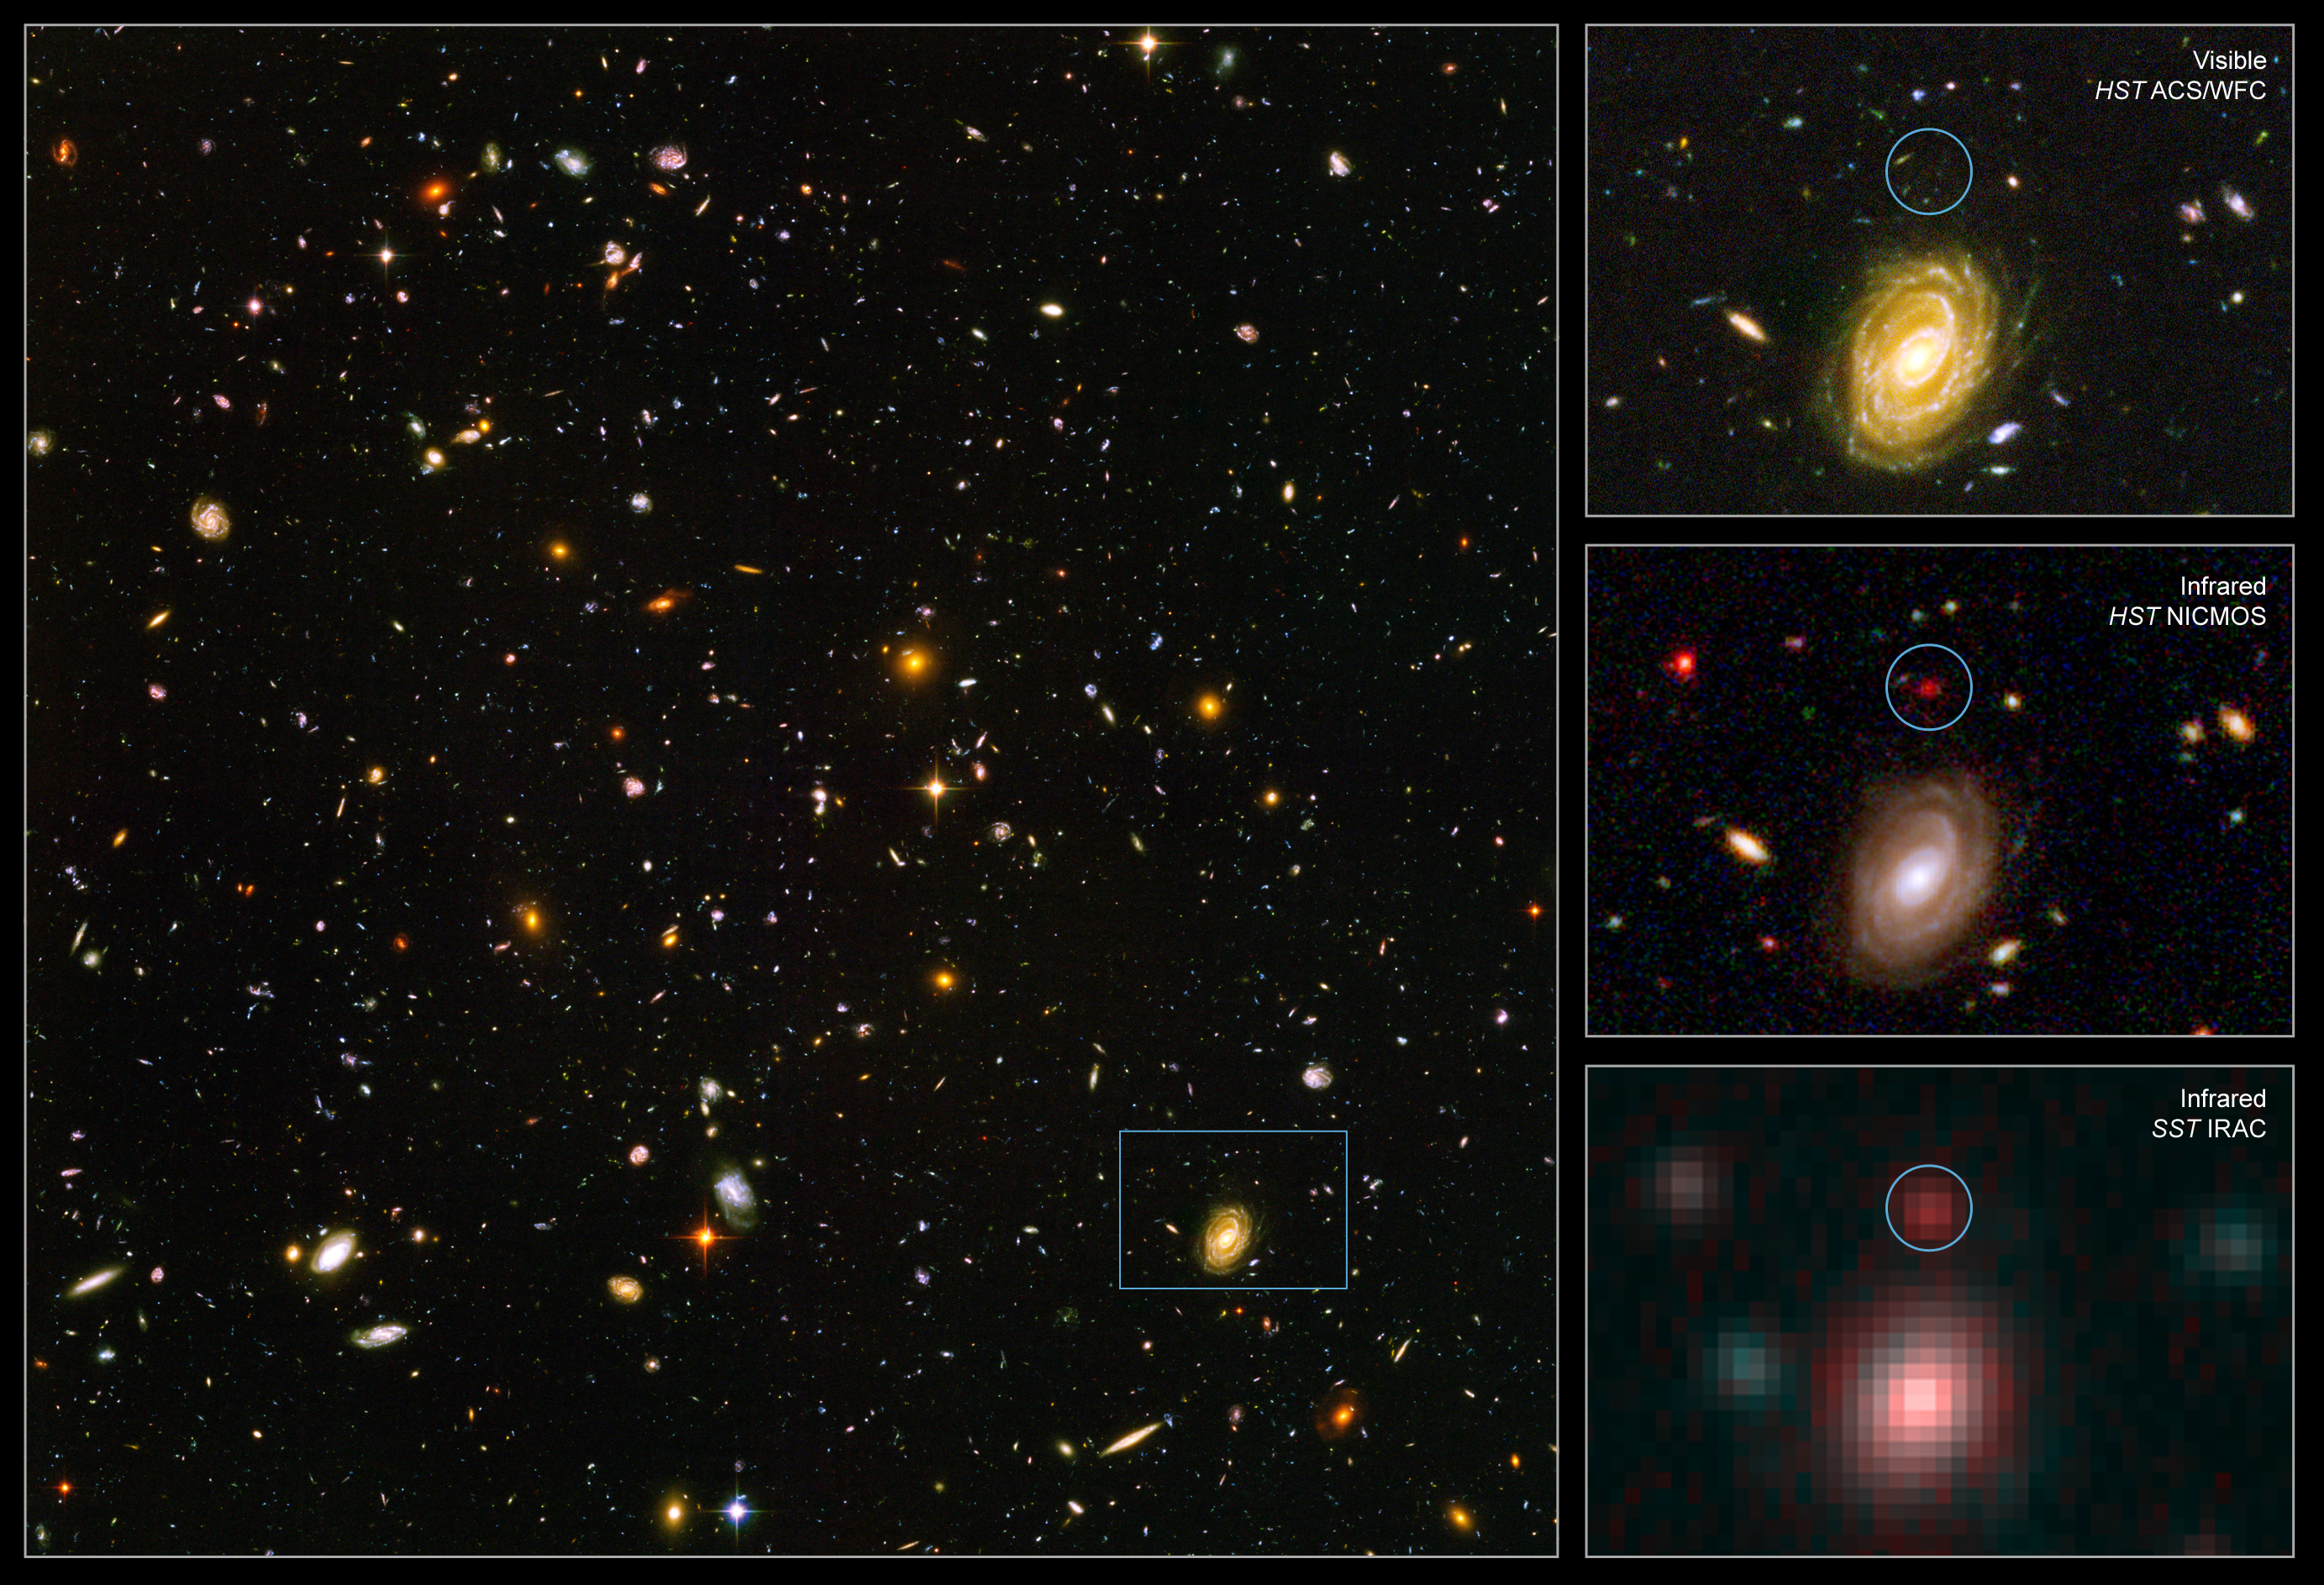

Spitzer and Hubble team up to find "Big Baby" galaxy in the newborn Universe

This image demonstrates how data from two space observatories, the Spitzer and Hubble Space Telescopes, are used to identify one of the most distant galaxies ever seen. This galaxy is unusually massive for its youthful age of 800 million years. (After the Big Bang, the Milky Way by comparison, is approximately 13 billion years old.)

[Left] - The galaxy, named HUDF-JD2, was pinpointed among approximately 10,000 others in a small area of sky called the Hubble Ultra Deep Field (HUDF). This is the deepest images of the universe ever made at optical and near-infrared wavelengths.

[Upper Right] - A blow-up of one small area of the HUDF is used to identify where the distant galaxy is located (inside green circle). This indicates that the galaxy's visible light has been absorbed by traveling billions of light-years through intervening hydrogen.

[Center Right] - The galaxy was detected using Hubble's Near Infrared Camera and Multi-Object Spectrometer (NICMOS). But at near-infrared wavelengths it is very faint and red.

[Bottom Right] - The Spitzer Infrared Array Camera (IRAC), easily detects the galaxy at longer infrared wavelengths. Spitzer's IRAC is sensitive to the light from older, redder stars, which should make up most of the mass in a galaxy. The brightness of the infrared galaxy suggests that it is quite massive.

Credit: NASA, ESA, B. Mobasher ( Space Telescope Science Institute and the European Space Agency)